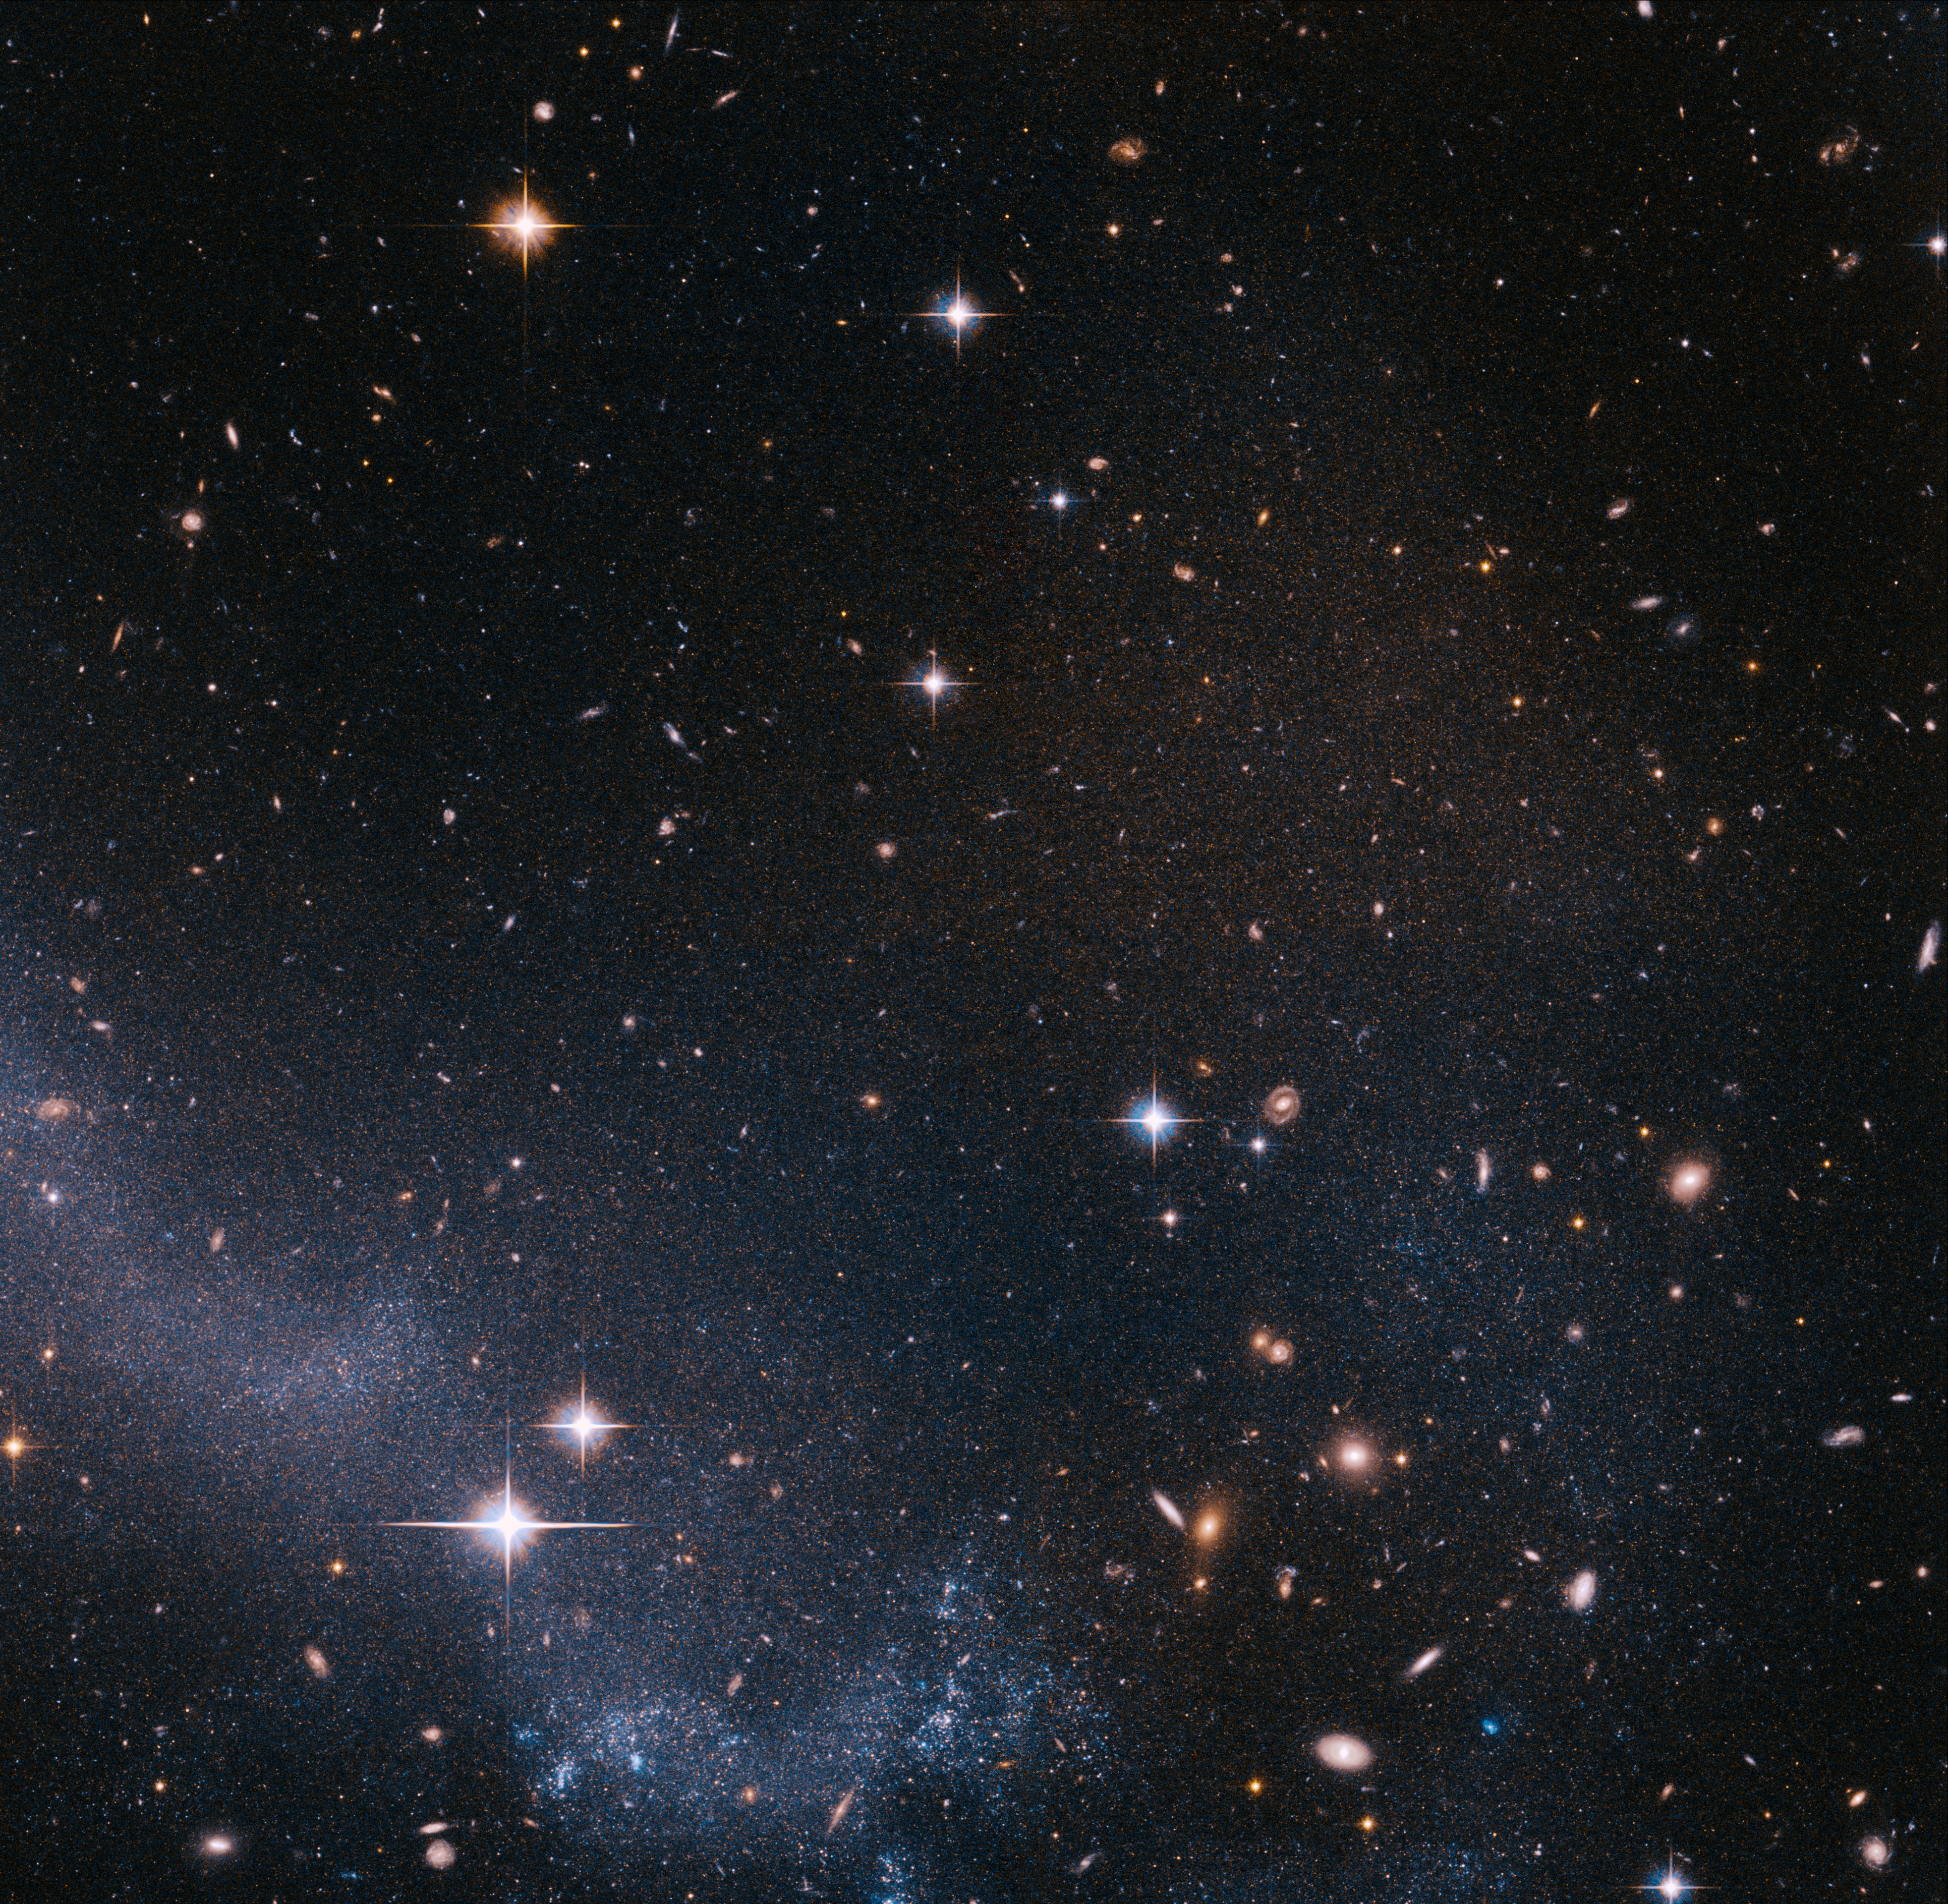

Stars in the tail of the Antennae

The Hubble ACS image shows a portion of the southern tidal tail of the Antennae galaxies. The main visible component consists of young blue stars recently formed out of the gas accumulating along the spine of the tail, and many red background galaxies can also be seen. The region is also filled by thousands of faint red stars, just visible when zooming on the image.

The Antennae Galaxies are among the closest known merging galaxies. The two galaxies, also known as NGC 4038 and NGC 4039, started to interact a few hundred million years ago, creating one of the most impressive sights in the night sky. They are considered by scientists as the archetypal merging galaxy system and are used as a standard with which to validate theories about galaxy evolution.

By measuring the colours and brightnesses of red giant stars in the system, the scientists found that the Antennae Galaxies are much closer than previously thought: 45 million light-years instead of the previous best estimate of 65 million light-years. These red stars cannot be brighter than a certain threshold, and it is this luminosity threshold that was used to derive the new distance of the Antennae.

Credit: NASA, ESA & Ivo Saviane (European Southern Observatory)